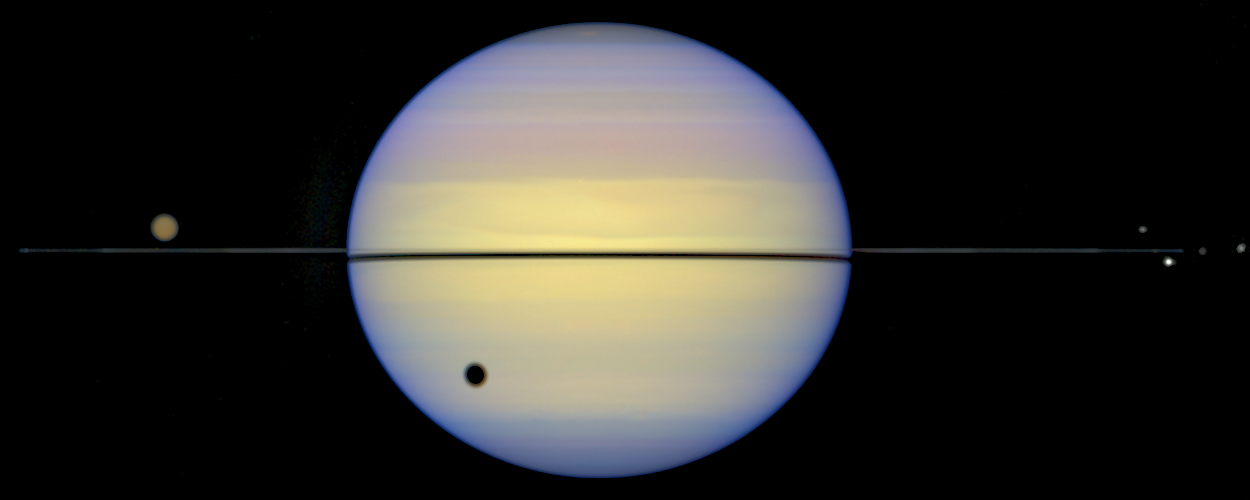

Edge-On View of Saturn's Rings

This is a Hubble Space Telescope snapshot of Saturn with its rings barely visible. Normally, astronomers see Saturn with its rings tilted. Earth was almost in the plane of Saturn's rings, thus the rings appear edge-on.

Credit: Erich Karkoschka (University of Arizona Lunar & Planetary Lab)and NASA/ESA